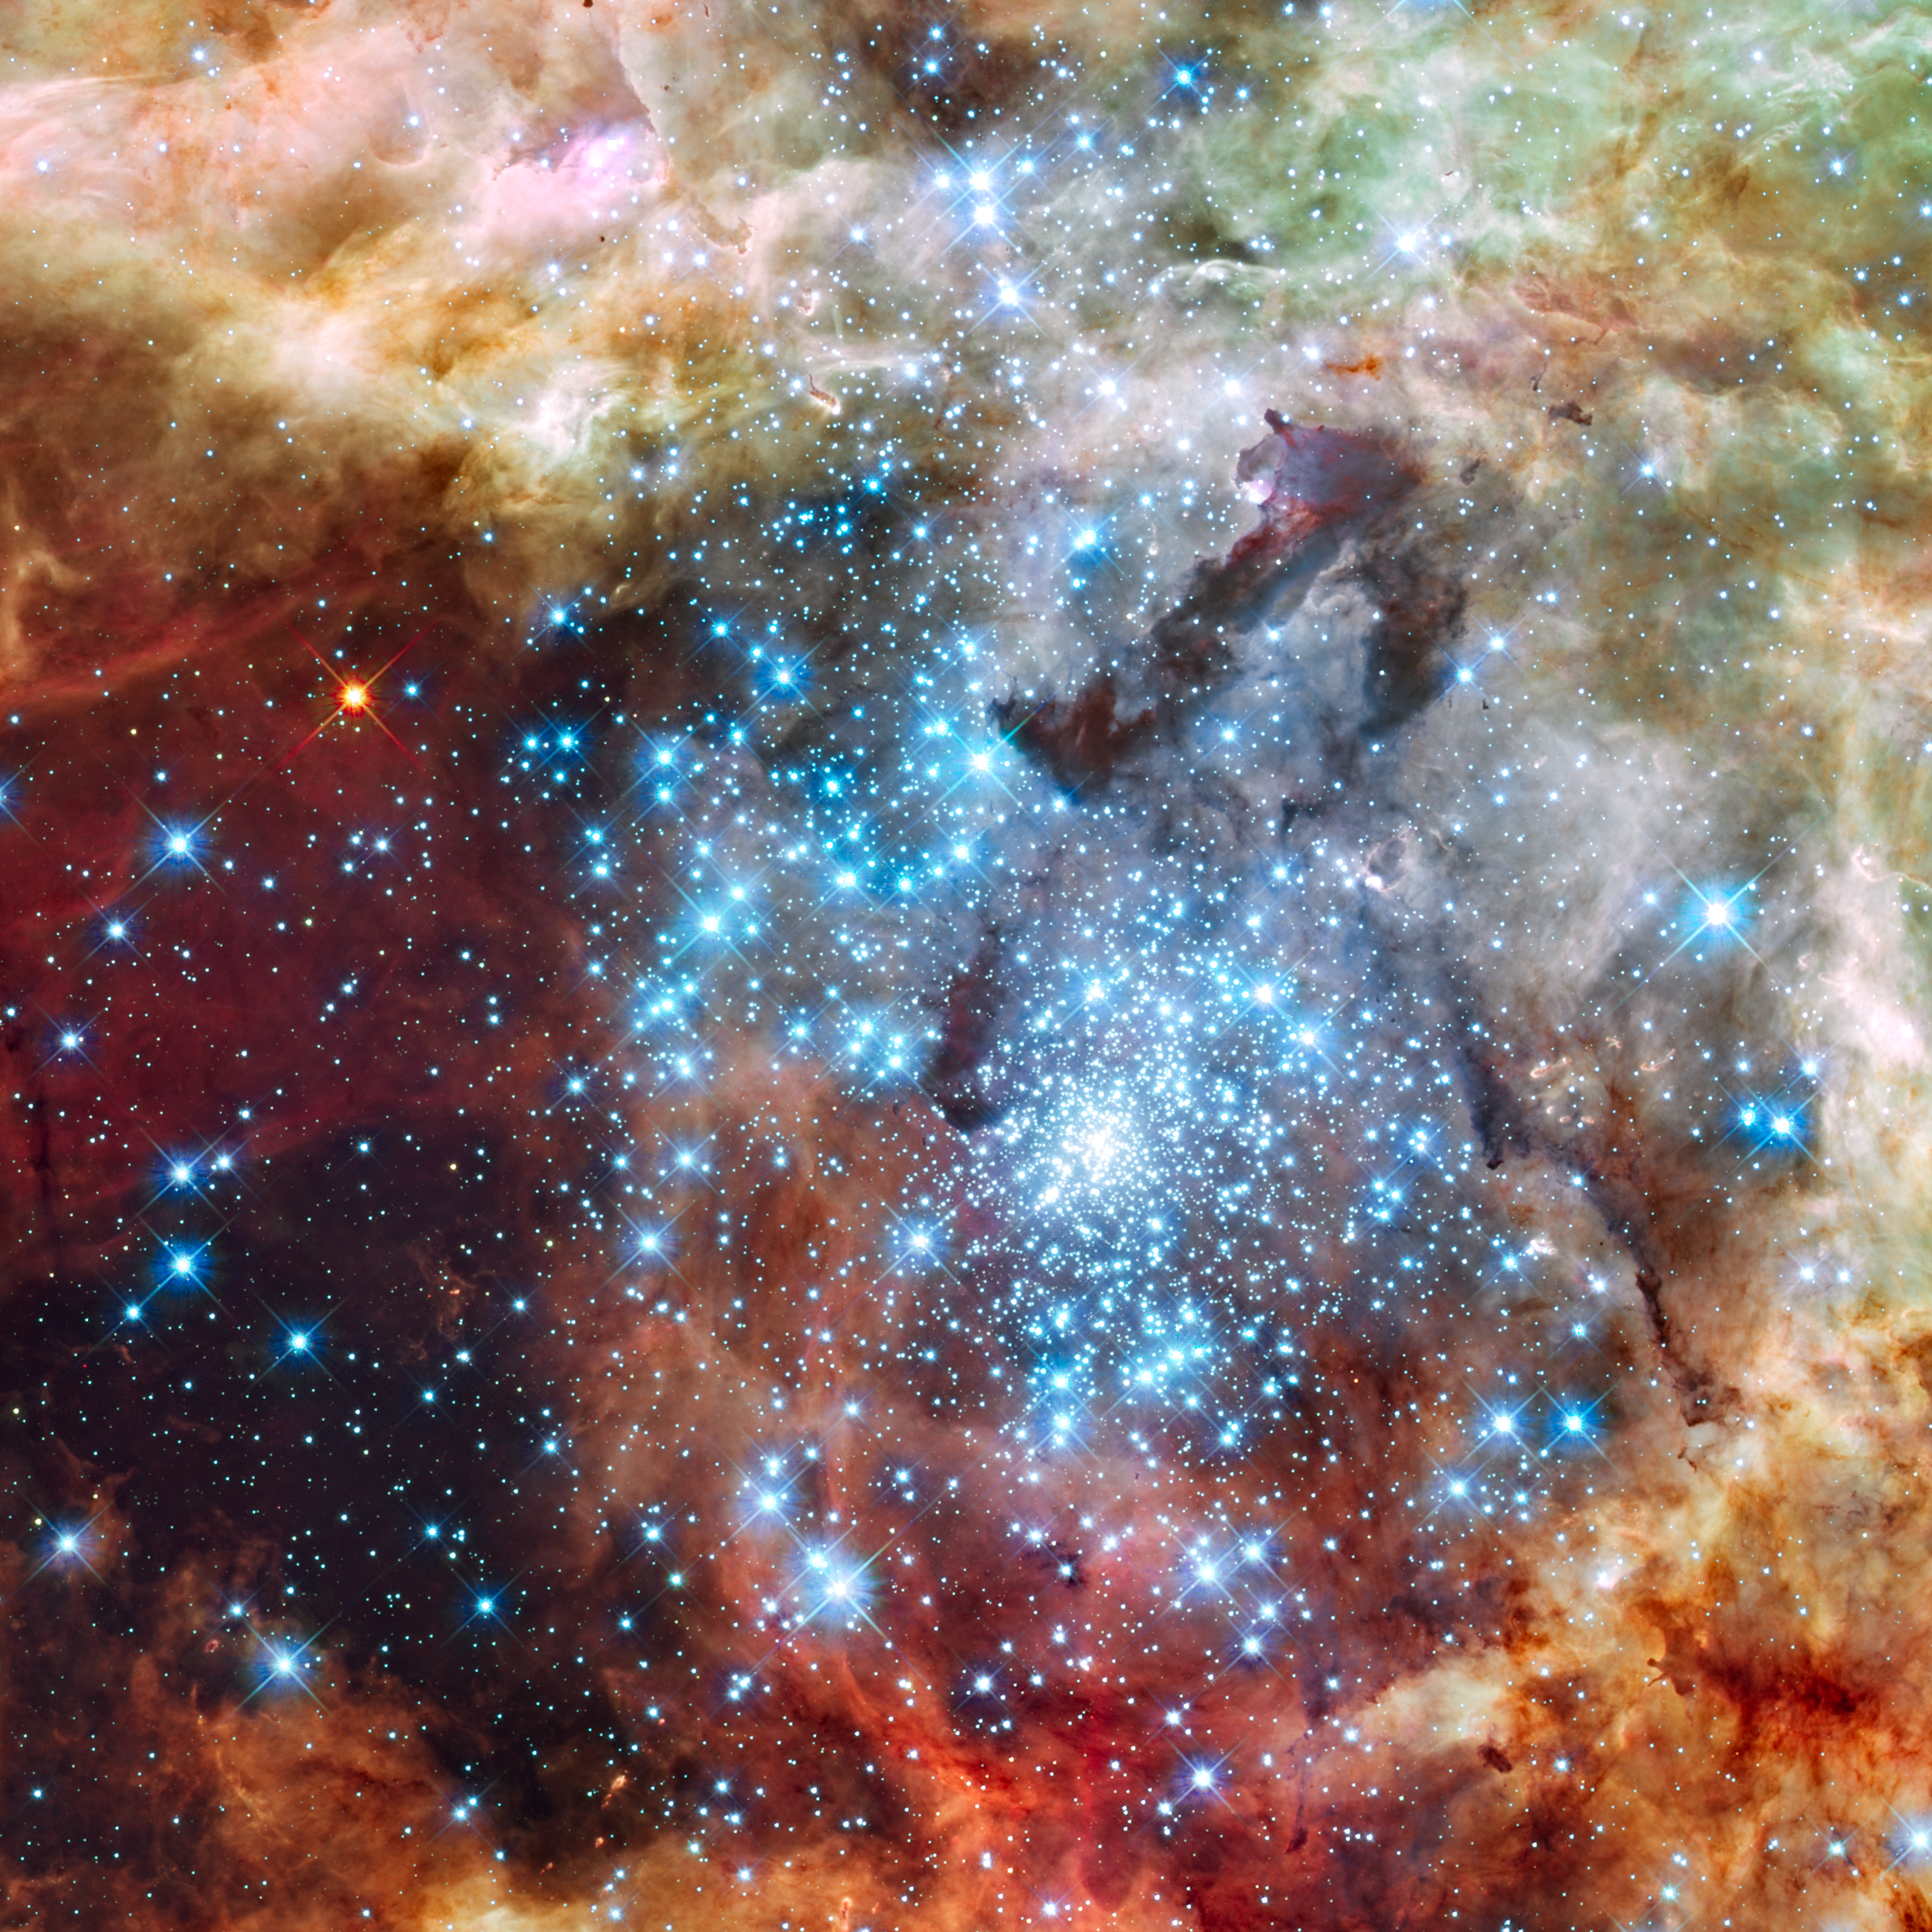

Merging clusters in 30 Doradus

This is a Hubble Space Telescope image of a pair of star clusters that are believed to be in the early stages of merging. The clusters lie in the gigantic 30 Doradus Nebula, which is 170,000 light-years from Earth.

Hubble's circumstantial evidence for the impending collision comes from seeing an elongated structure in the cluster at upper left, and from measuring a different age between the two clusters. Also, the unusually large number of high-velocity stars around 30 Doradus can finally be explained if a small cluster has merged into the big cluster R136 in the centre of the Tarantula Nebula.

This nearby example of cluster interaction yields insights into how star clusters may have formed in the early Universe.

The Hubble observations, made with the Wide Field Camera 3, were taken 20-27 October, 2009. The blue colour is light from the hottest, most massive stars; the green from the glow of oxygen; and the red from fluorescing hydrogen.

Credit: NASA, ESA, and E. Sabbi (ESA/STScI) Acknowledgment: R. O'Connell (University of Virginia) and the Wide Field Camera 3 Science Oversight Committee